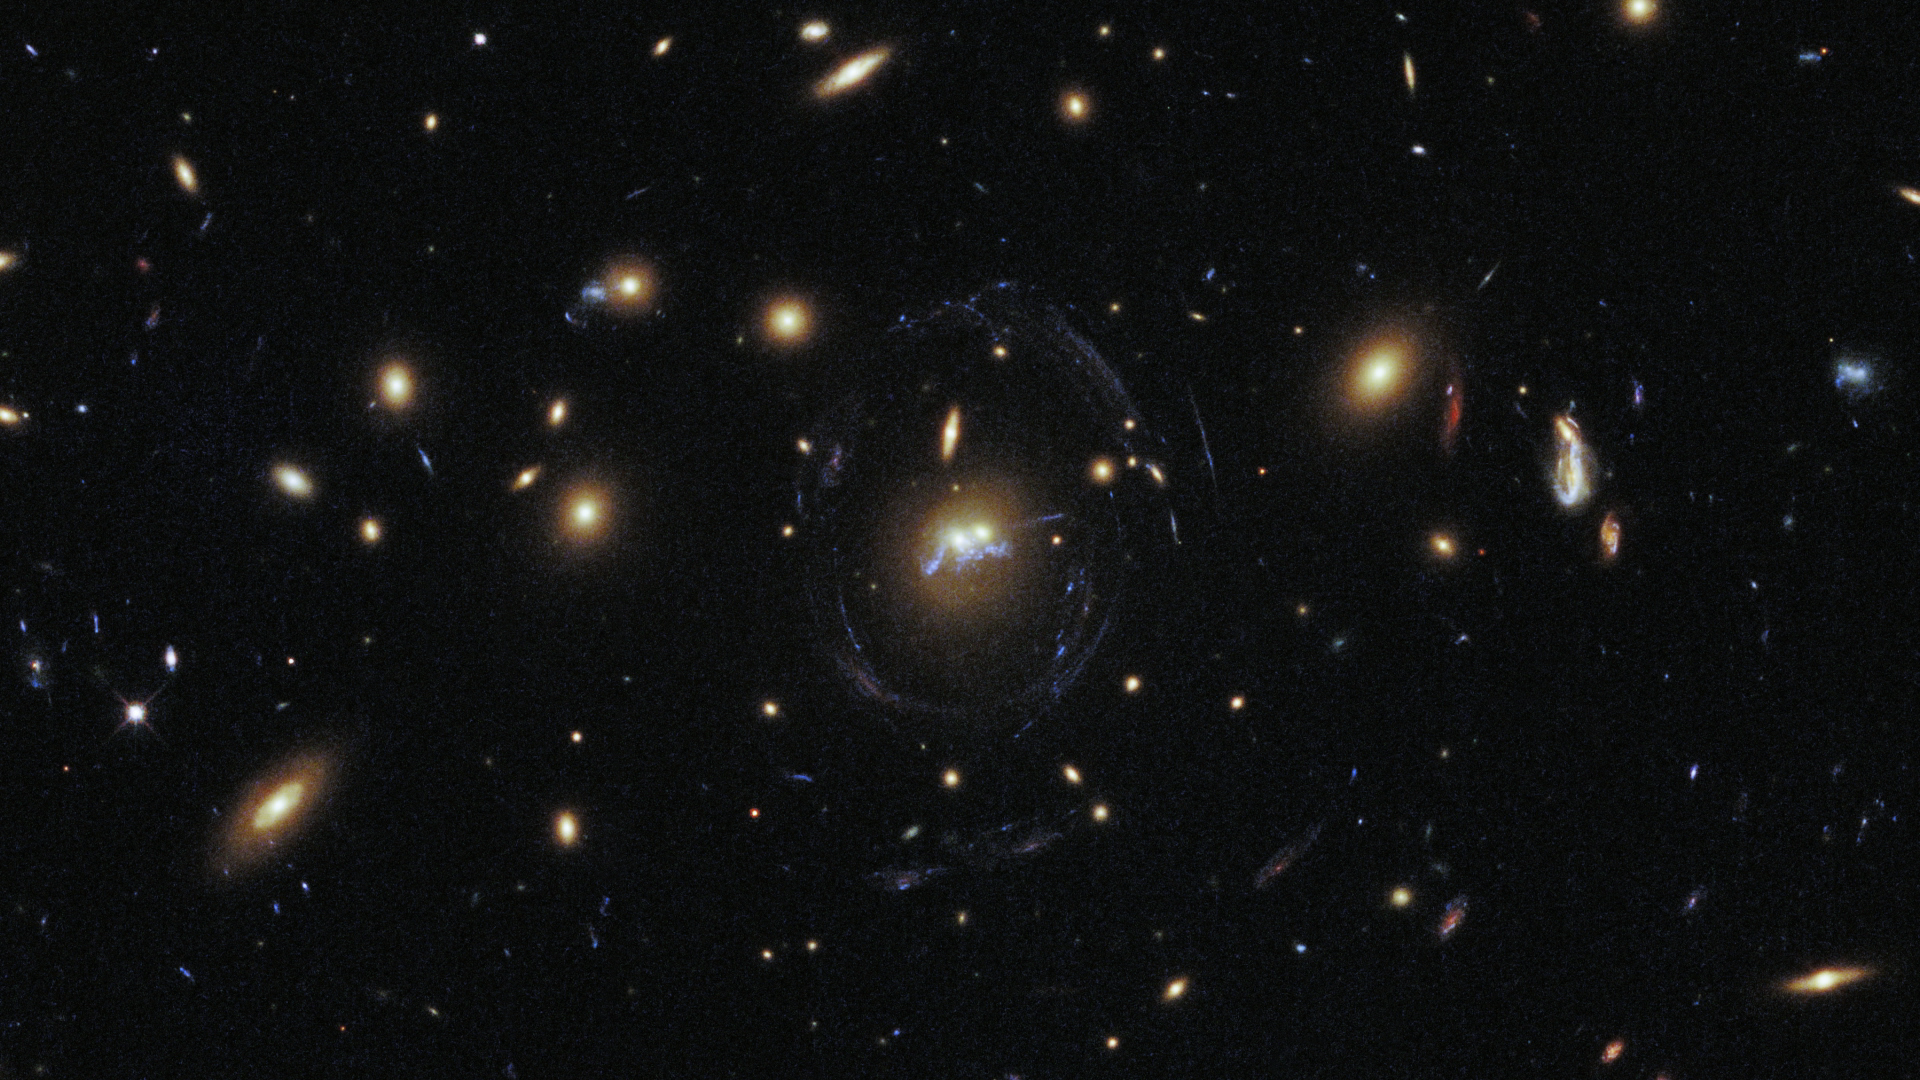

Screenshot of Hubblecast 76

Screenshot of Hubblecast 76: Merging galaxies and droplets of starbirth.

Credit: NASA & ESA